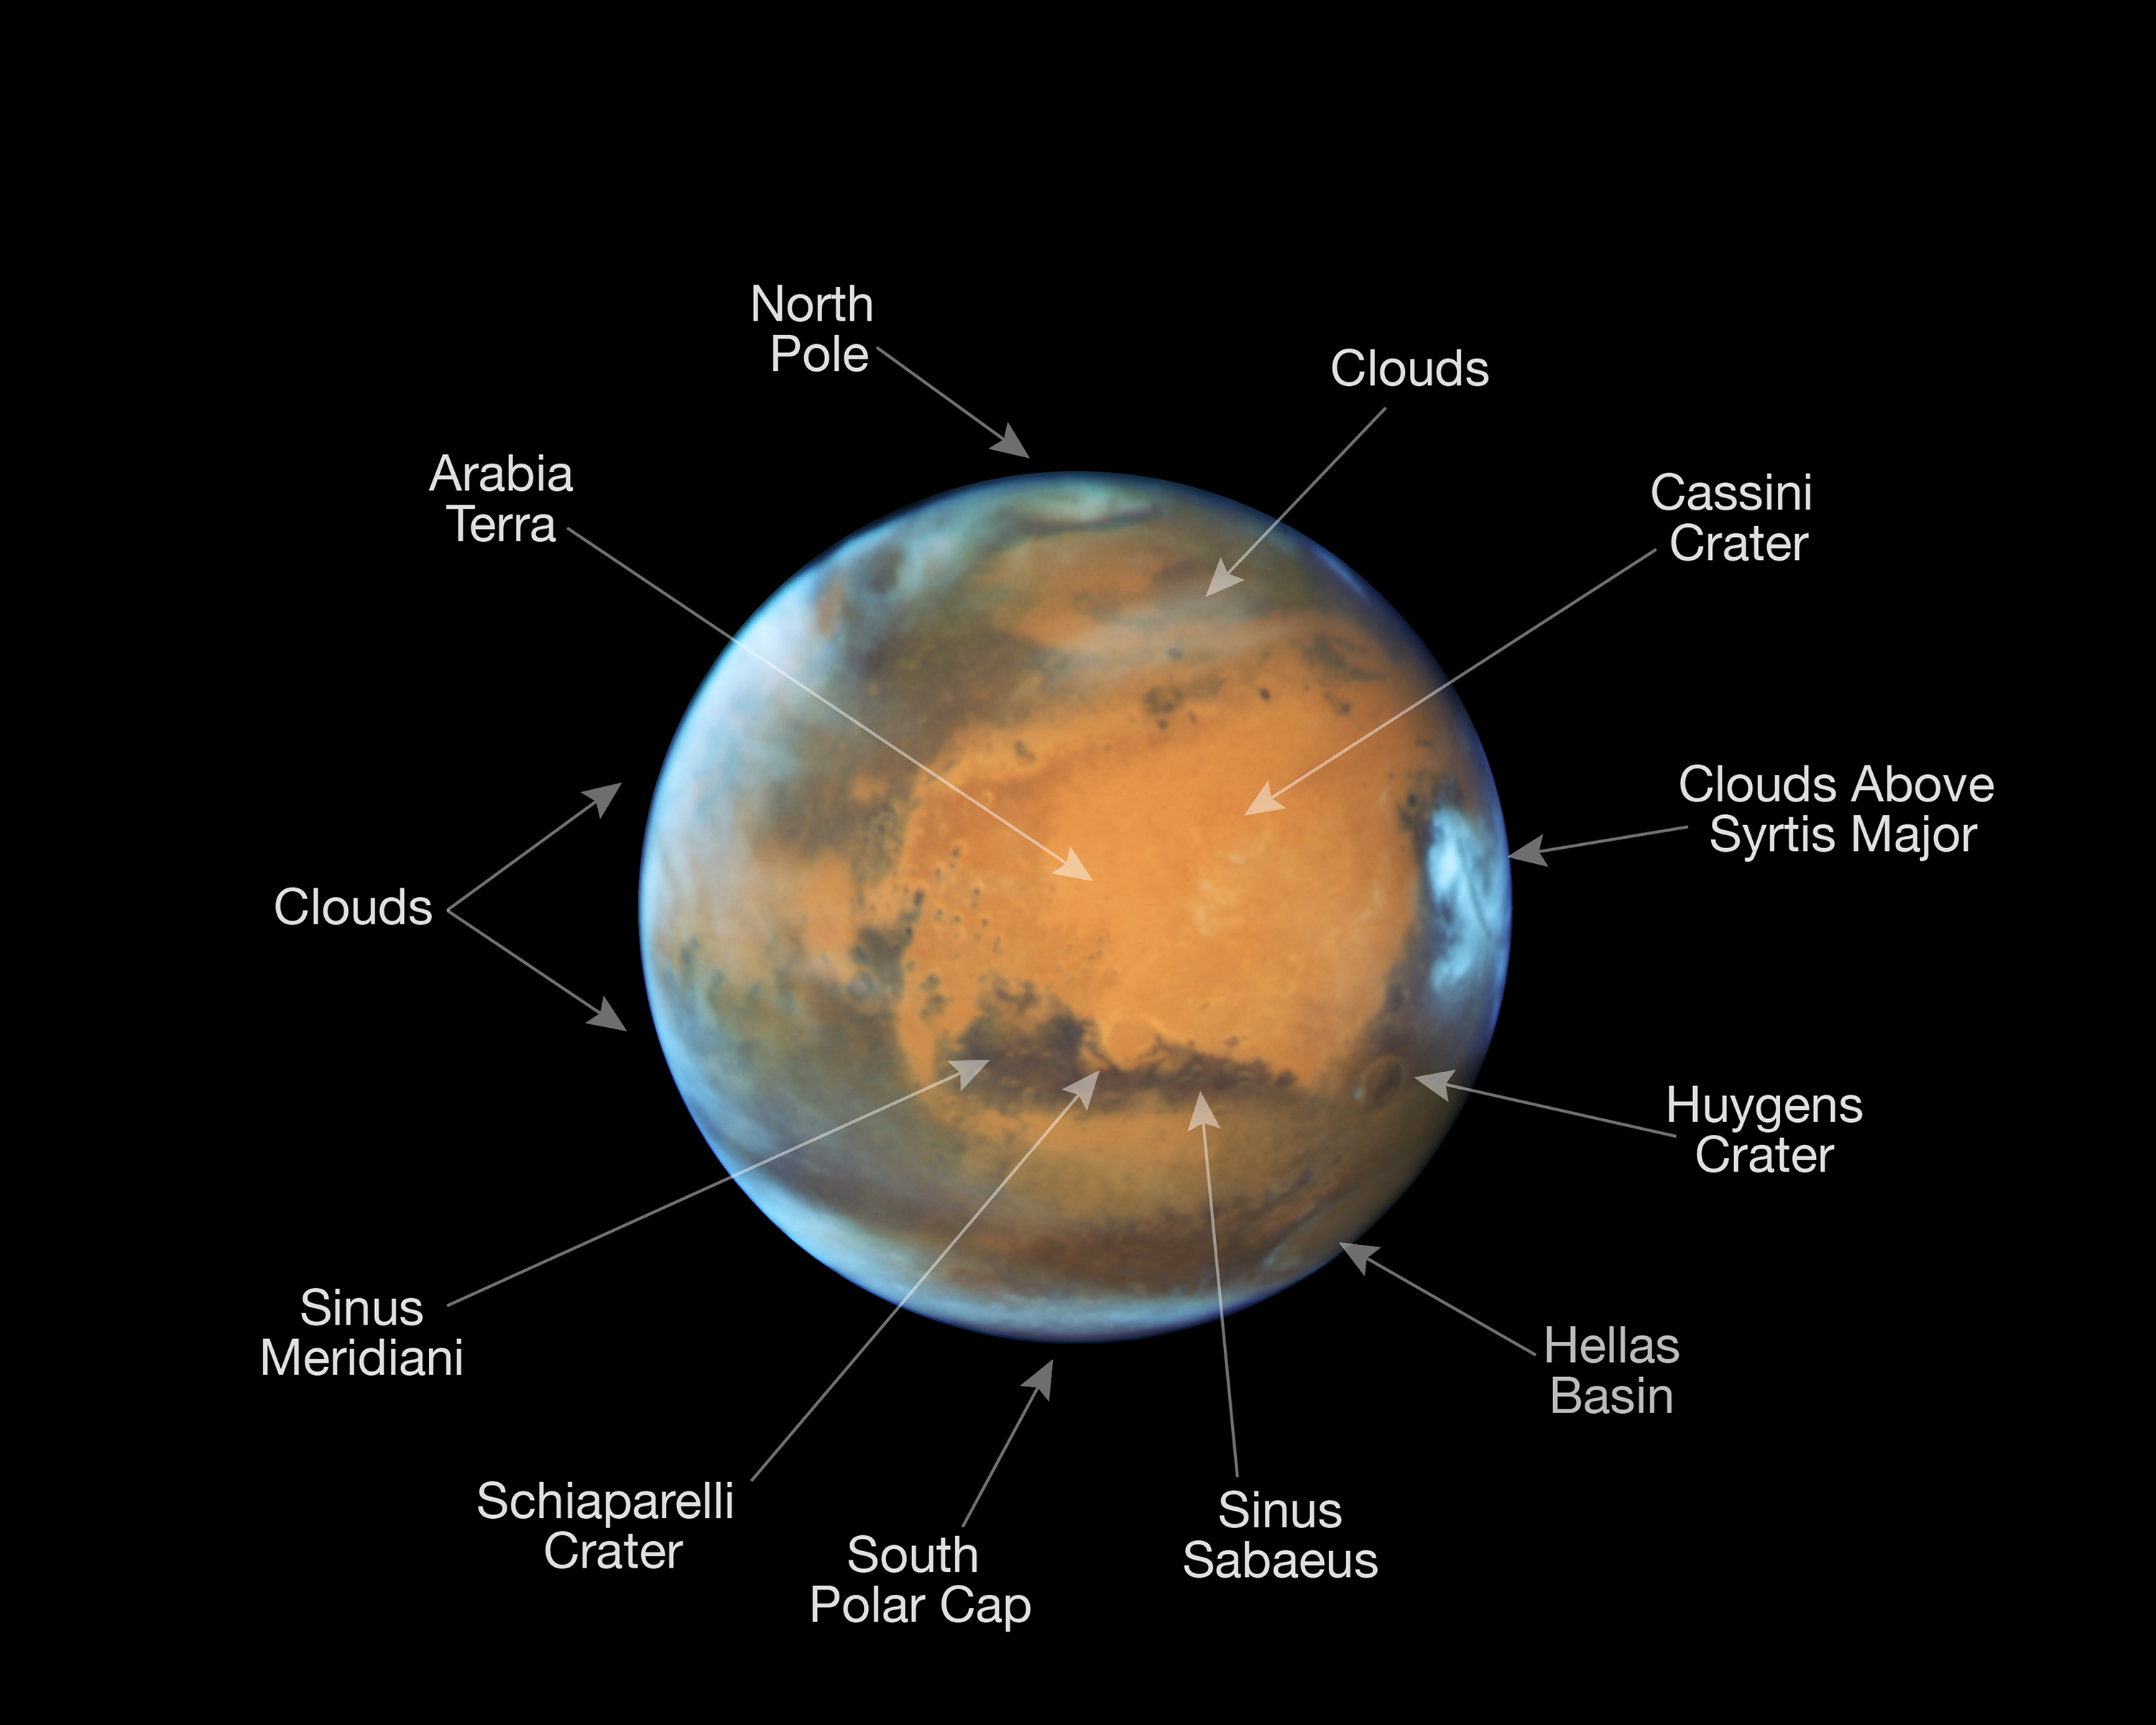

Mars in opposition 2016 (annotated version)

This image shows our neighbouring planet Mars, as it was observed shortly before opposition in 2016 by the NASA/ESA Hubble Space Telescope.

Some prominent features on the surface of the planet have been annotated.

Credit: NASA, ESA, the Hubble Heritage Team (STScI/AURA), J. Bell (ASU), and M. Wolff (Space Science Institute)